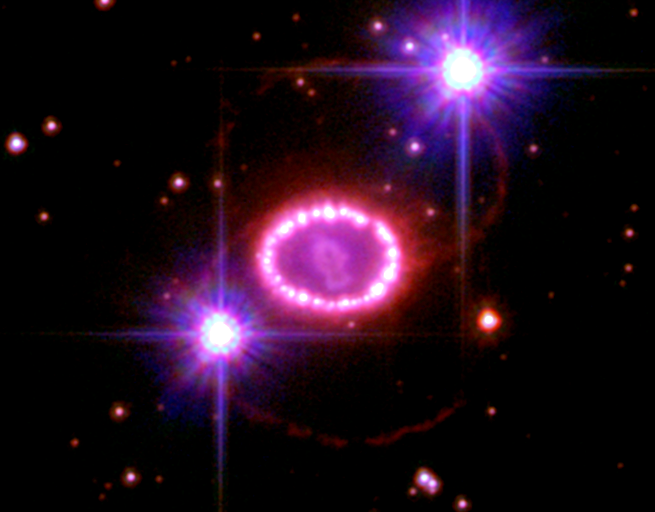

A String of 'Cosmic Pearls' Surrounds an Exploding Star

Two decades ago, astronomers spotted one of the brightest exploding stars in more than 400 years.

Since that first sighting, the doomed star, called Supernova 1987A, has continued to fascinate astronomers with its spectacular light show. The NASA/ESA Hubble Space Telescope is one of many observatories that has been monitoring the blast's aftermath.

This image shows the entire region around the supernova. The most prominent feature in the image is a ring with dozens of bright spots. A shock wave of material unleashed by the stellar blast is slamming into regions along the ring's inner regions, heating them up, and causing them to glow. The ring, about a light-year across, was probably shed by the star about 20,000 years before it exploded.

Astronomers detected the first bright spot in 1997, but now they see dozens of spots around the ring. Only Hubble can see the individual bright spots. In the next few years, the entire ring will be ablaze as it absorbs the full force of the crash. The glowing ring is expected to become bright enough to illuminate the star's surroundings, providing astronomers with new information on how the star expelled material before the explosion.

The pink object in the centre of the ring is debris from the supernova blast. The glowing debris is being heated by radioactive elements, principally titanium 44, created in the explosion. The debris will continue to glow for many decades.

The origin of a pair of faint outer red rings, located above and below the doomed star, is a mystery. The two bright objects that look like car headlights are a pair of stars in the Large Magellanic Cloud. The supernova is located 163,000 light-years away in the Large Magellanic Cloud.

The image was taken in December 2006 with Hubble's Advanced Camera for Surveys.

Credit: NASA, ESA, and R. Kirshner (Harvard-Smithsonian Center for Astrophysics)